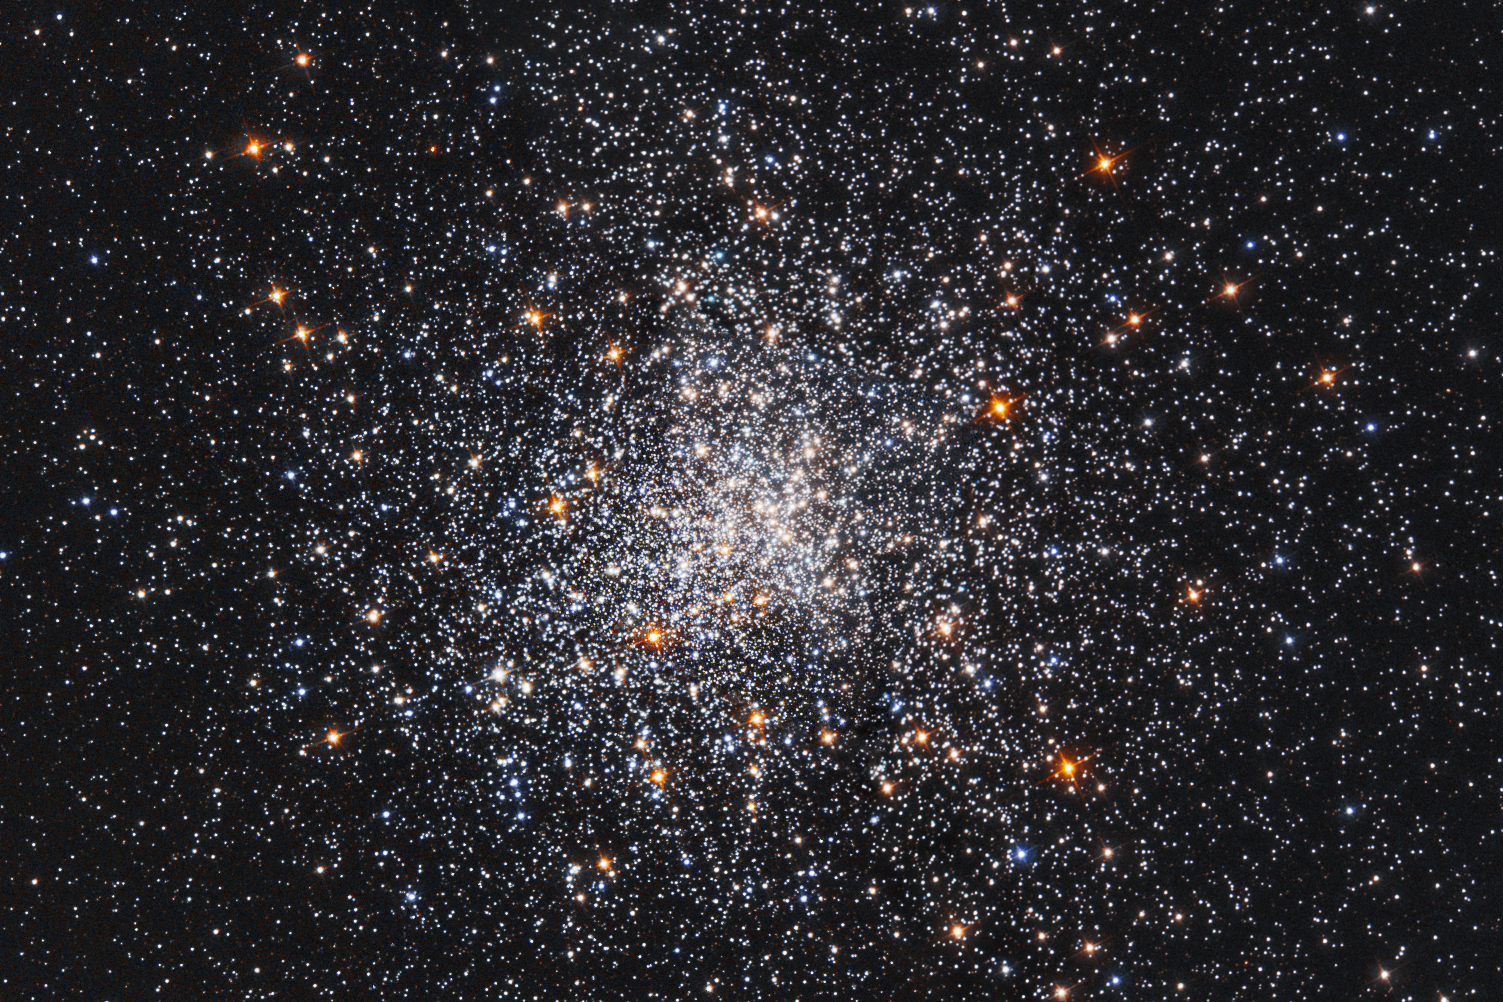

A snowstorm of stars

It’s beginning to look a lot like Christmas in this NASA/ESA Hubble Space Telescope image of a blizzard of stars, which resembles a swirling storm in a snow globe.

These stars make up the globular cluster Messier 79, located about 40 000 light-years from Earth in the constellation of Lepus (The Hare). Globular clusters are gravitationally bound groupings of up to one million stars. These giant “star globes” contain some of the oldest stars in our galaxy. Messier 79 is no exception; it contains about 150 000 stars, packed into an area measuring just roughly 120 light-years across.

This 11.7-billion-year-old star cluster was first discovered by French astronomer Pierre Méchain in 1780. Méchain reported the finding to his colleague Charles Messier, who included it in his catalogue of non-cometary objects: The Messier catalogue. About four years later, using a larger telescope than Messier’s, William Herschel was able to resolve the stars in Messier 79 and described it as a “globular star cluster.”

In this sparkling Hubble image, Sun-like stars appear yellow-white and the reddish stars are bright giants that are in the final stages of their lives. Most of the blue stars sprinkled throughout the cluster are aging “helium-burning” stars, which have exhausted their hydrogen fuel and are now fusing helium in their cores.

Credit: NASA and ESA Acknowledgement: S. Djorgovski (Caltech) and F. Ferraro (University of Bologna)